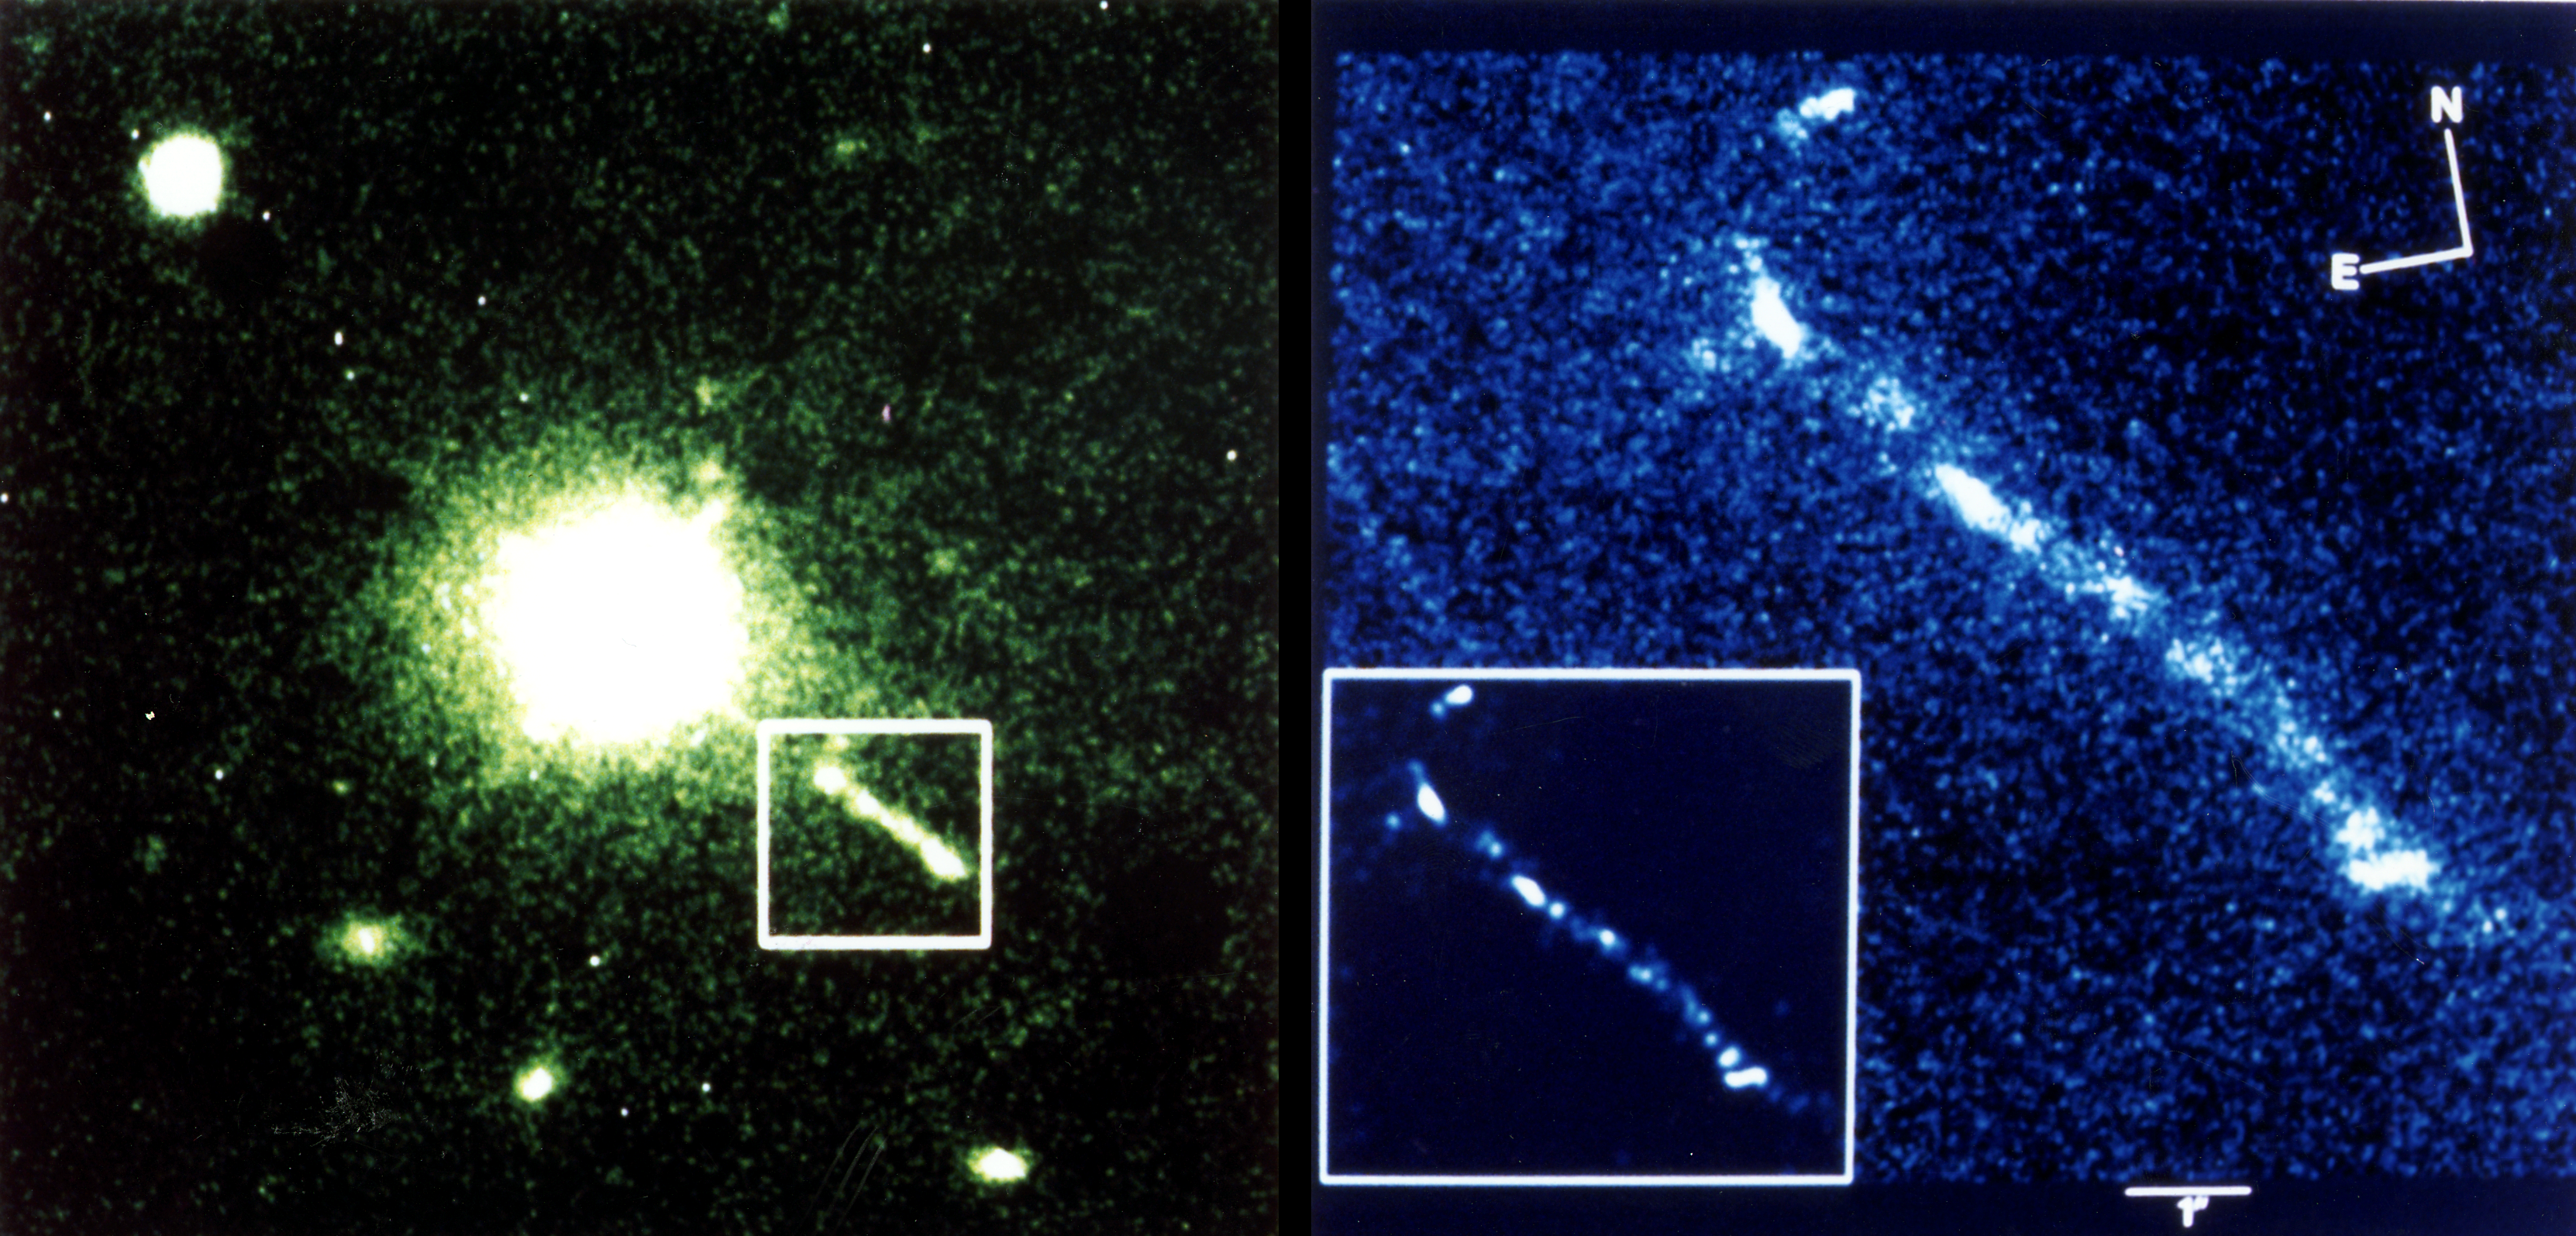

HST snaps optical jet of quasar 3c 273

The Green (V band) image (left) shows the field around the quasar 3c 273 (courtesy Matthew Colless, David Schade and the CFHT). The optical jet can be seen SW of the quasar. The blue (B band) image (right) shows the optical jet as seen by the Faint Object Camera (FOC) on board the Hubble Space Telescope. For comparasion, the 11X11 arcesec FOC field of view is marked on the ground based CFHT image. The insert (right) is a Maximum Entropy reconstructionof the FOC image. This FOC image is derived from three linearly polarized images which show that the brightest knots are highly polarized (20%-50%).a letter which describes these data appears in the 9 September 1993 issue of Nature.

Credit: R.C. Thomson, IoA, Cambridge, UK;C.D. Mackay, IoA, Cambridge, UK;A.E. Wright, ATNF, Parkes, Australia